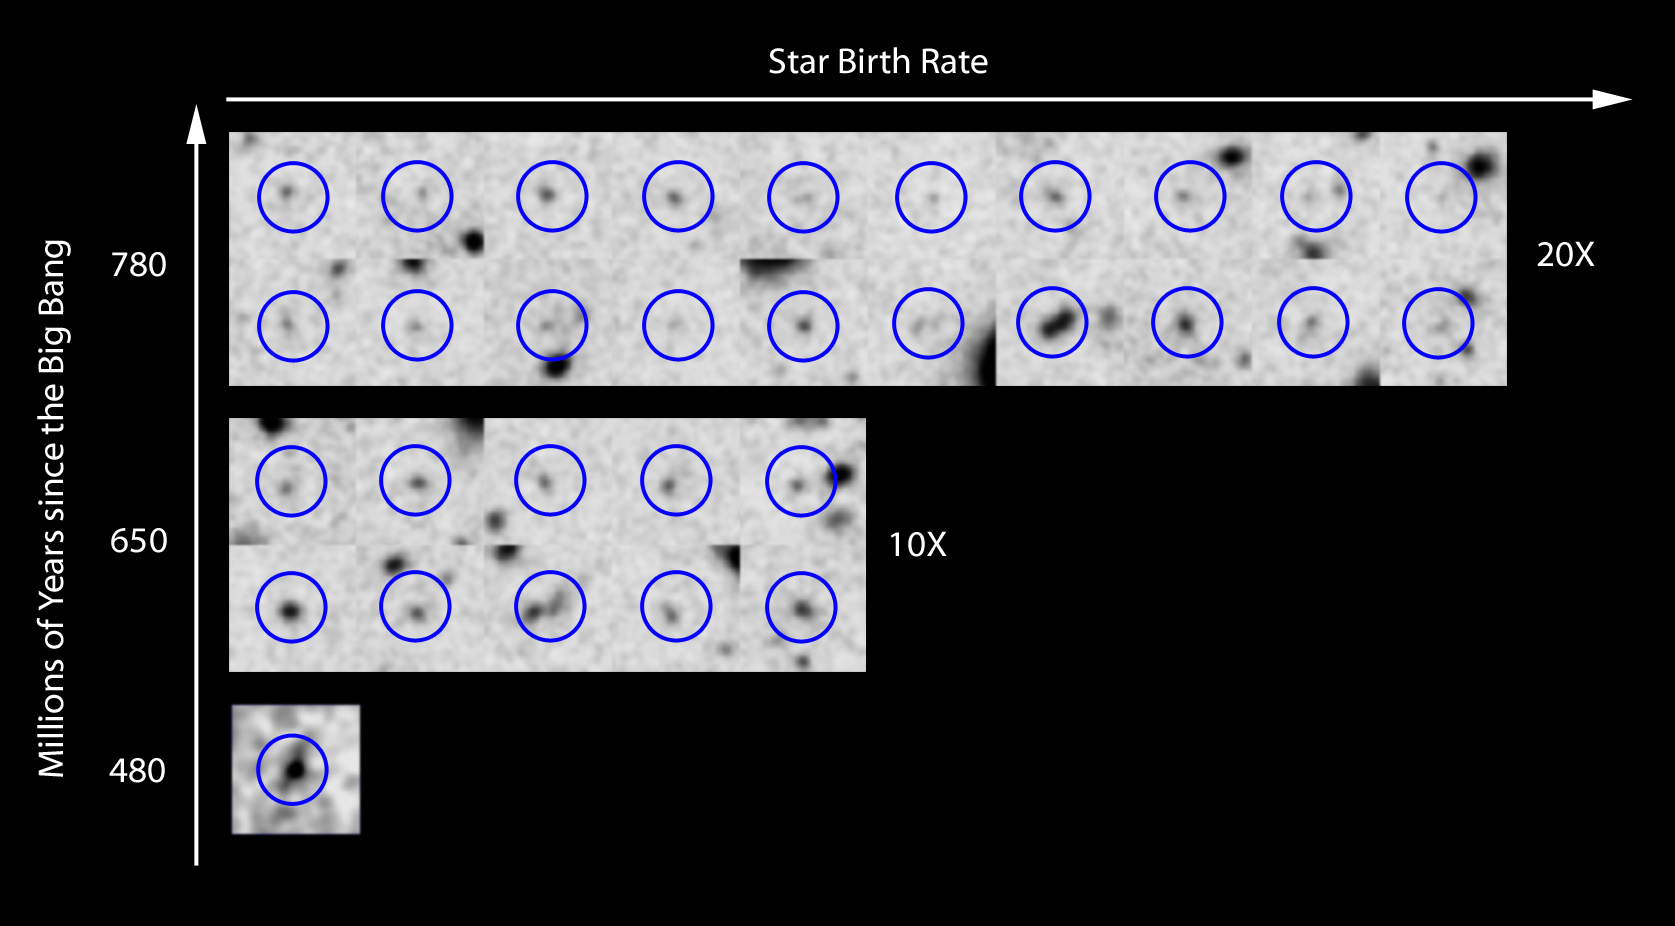

Rate of star birth in the early Universe

New Hubble Space Telescope results show that the rate of star birth changed dramatically in the universe over just 170 million years, increasing by ten times from 480 million years after the Big Bang to 650 million years, and doubling again in the next 130 million years.

The astonishing tenfold increase in star birth happened in a period that is just 1 per cent of the current age of the Universe. This is shown schematically in this figure that shows the new candidate galaxy at 480 million years and comparable galaxies from the epoch at 650 million years and at 780 million years after the Big Bang to represent the relative amounts of star birth in galaxies at different times.

Credit: NASA, ESA, G. Illingworth (University of California, Santa Cruz), R. Bouwens (University of California, Santa Cruz, and LeidenUniversity) and the HUDF09 Team